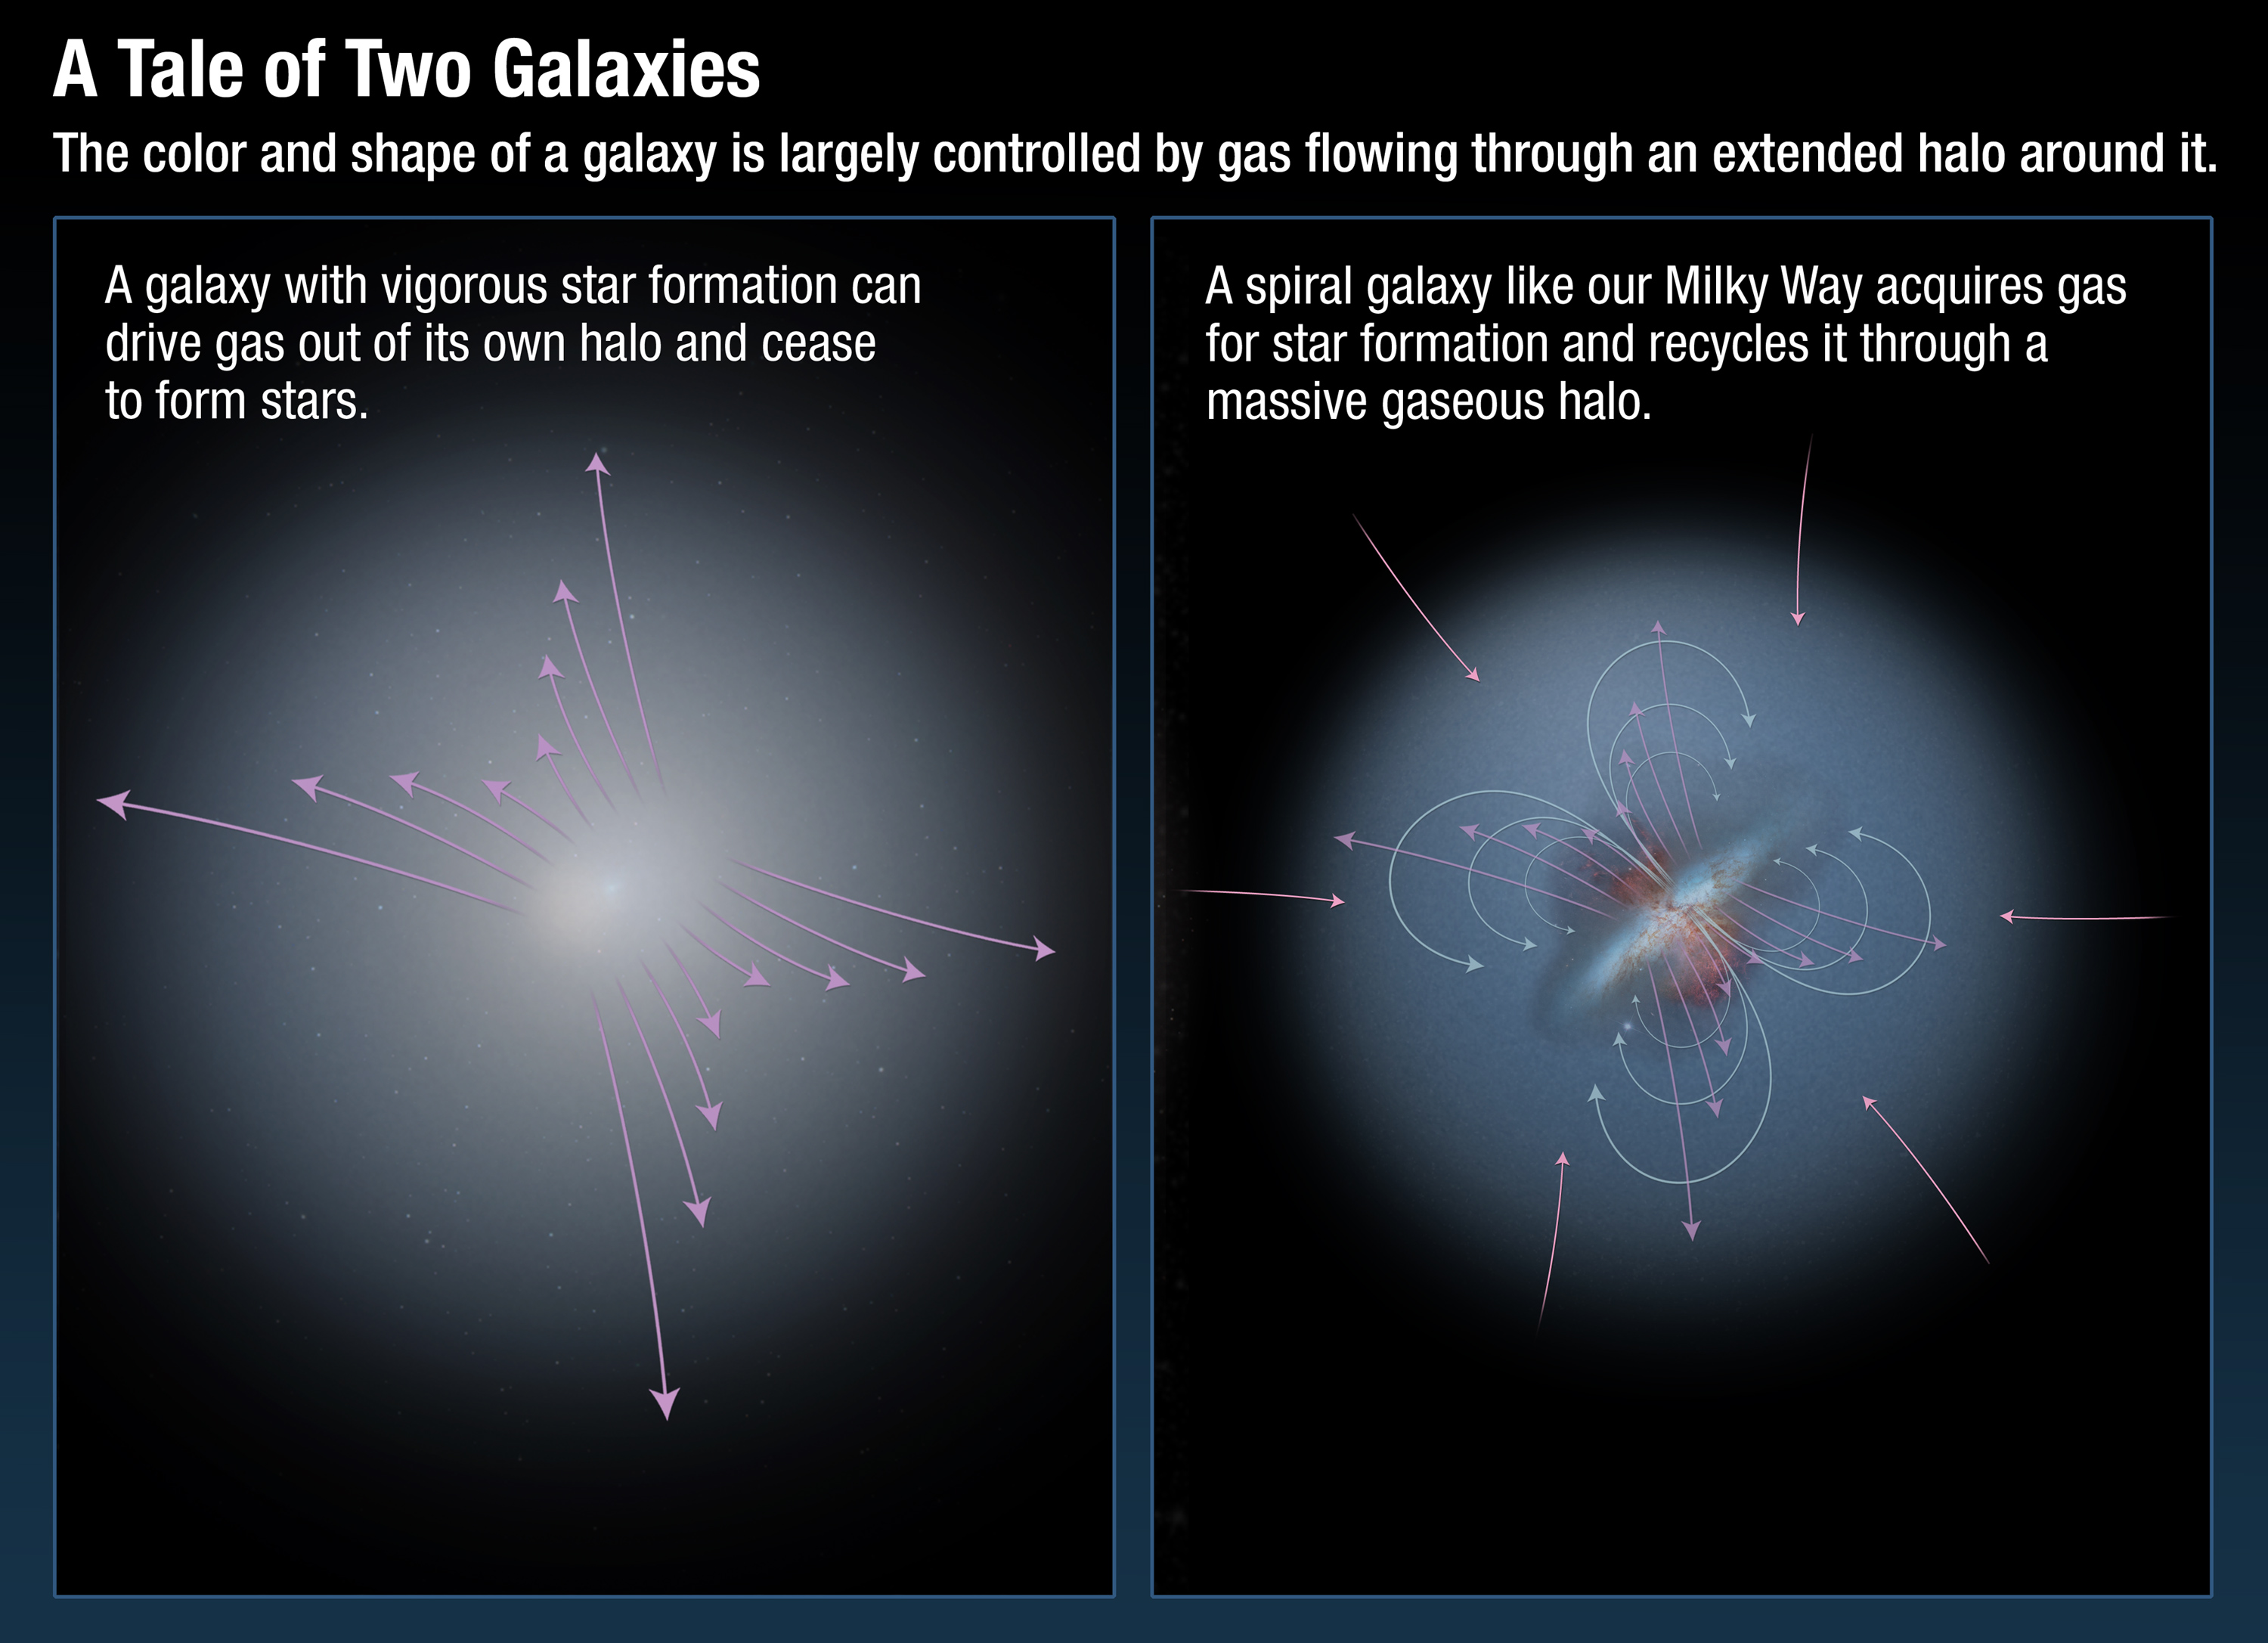

A tale of two galaxies

The colour and shape of a galaxy is largely controlled by gas flowing through an extended halo around it. All modern simulations of galaxy formation find that they cannot explain the observed properties of galaxies without modeling the complex accretion and "feedback" processes by which galaxies acquire gas and then later expel it after chemical processing by stars. Hubble spectroscopic observations show that galaxies like our Milky Way recycle gas while galaxies undergoing a rapid starburst of activity will lose gas into intergalactic space and become "red and dead."

Credit: NASA, ESA, and A. Feild (STScI). Science Credit: NASA, ESA, N. Lehner (University of Notre Dame), T. Tripp (University of Massachusetts, Amherst), and J. Tumlinson (STScI)